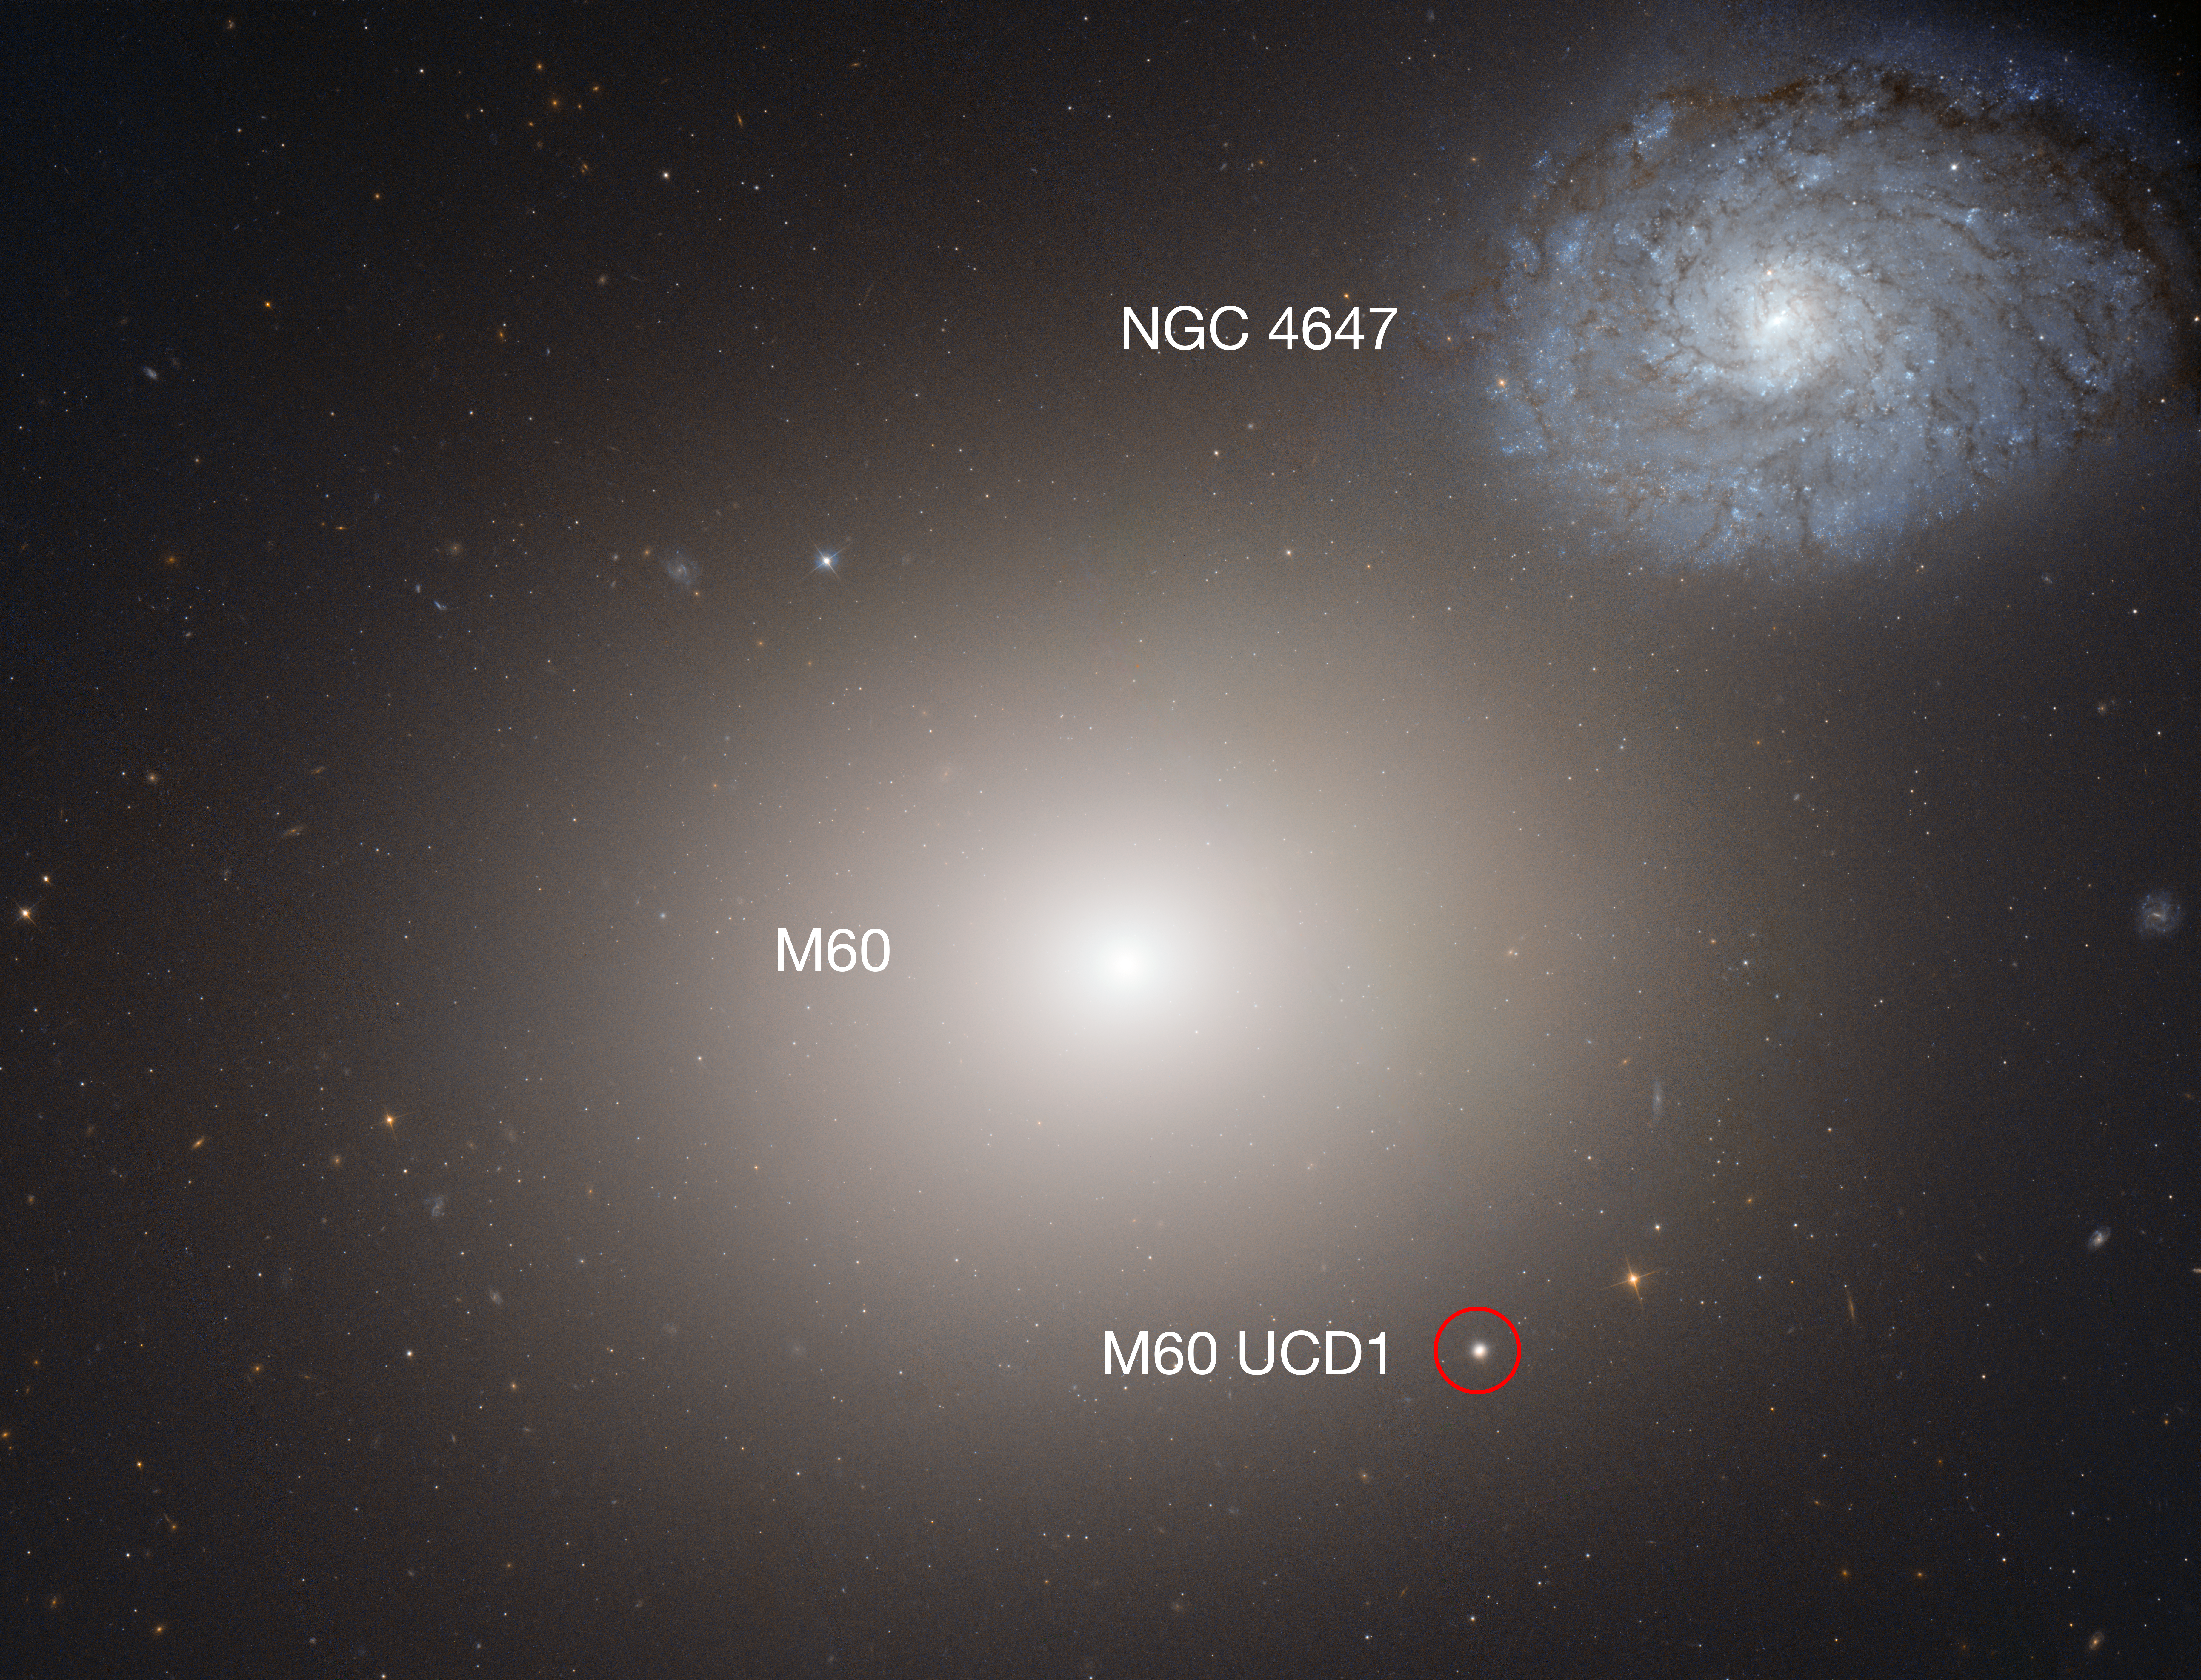

Hubble image of Arp 116 (annotated)

This image shows Arp 116, which is composed of a giant elliptical galaxy known as Messier 60, and a much smaller spiral galaxy, NGC 4647. Also included in the image is an annotated pointer to their even smaller neighbour M60-UCD1.

Lying about 50 million light-years away, M60-UCD1 is a tiny galaxy with a diameter of 300 light-years — just 1/500th of the diameter of the Milky Way! Despite its size it is pretty crowded, containing some 140 million stars.

An international team of astronomers have found a supermassive black hole at the centre of M60-UCD1 with the mass of 20 million Suns.

The original version of this image can be found here.

Credit: NASA, ESA and the Hubble Heritage(STScI/AURA)